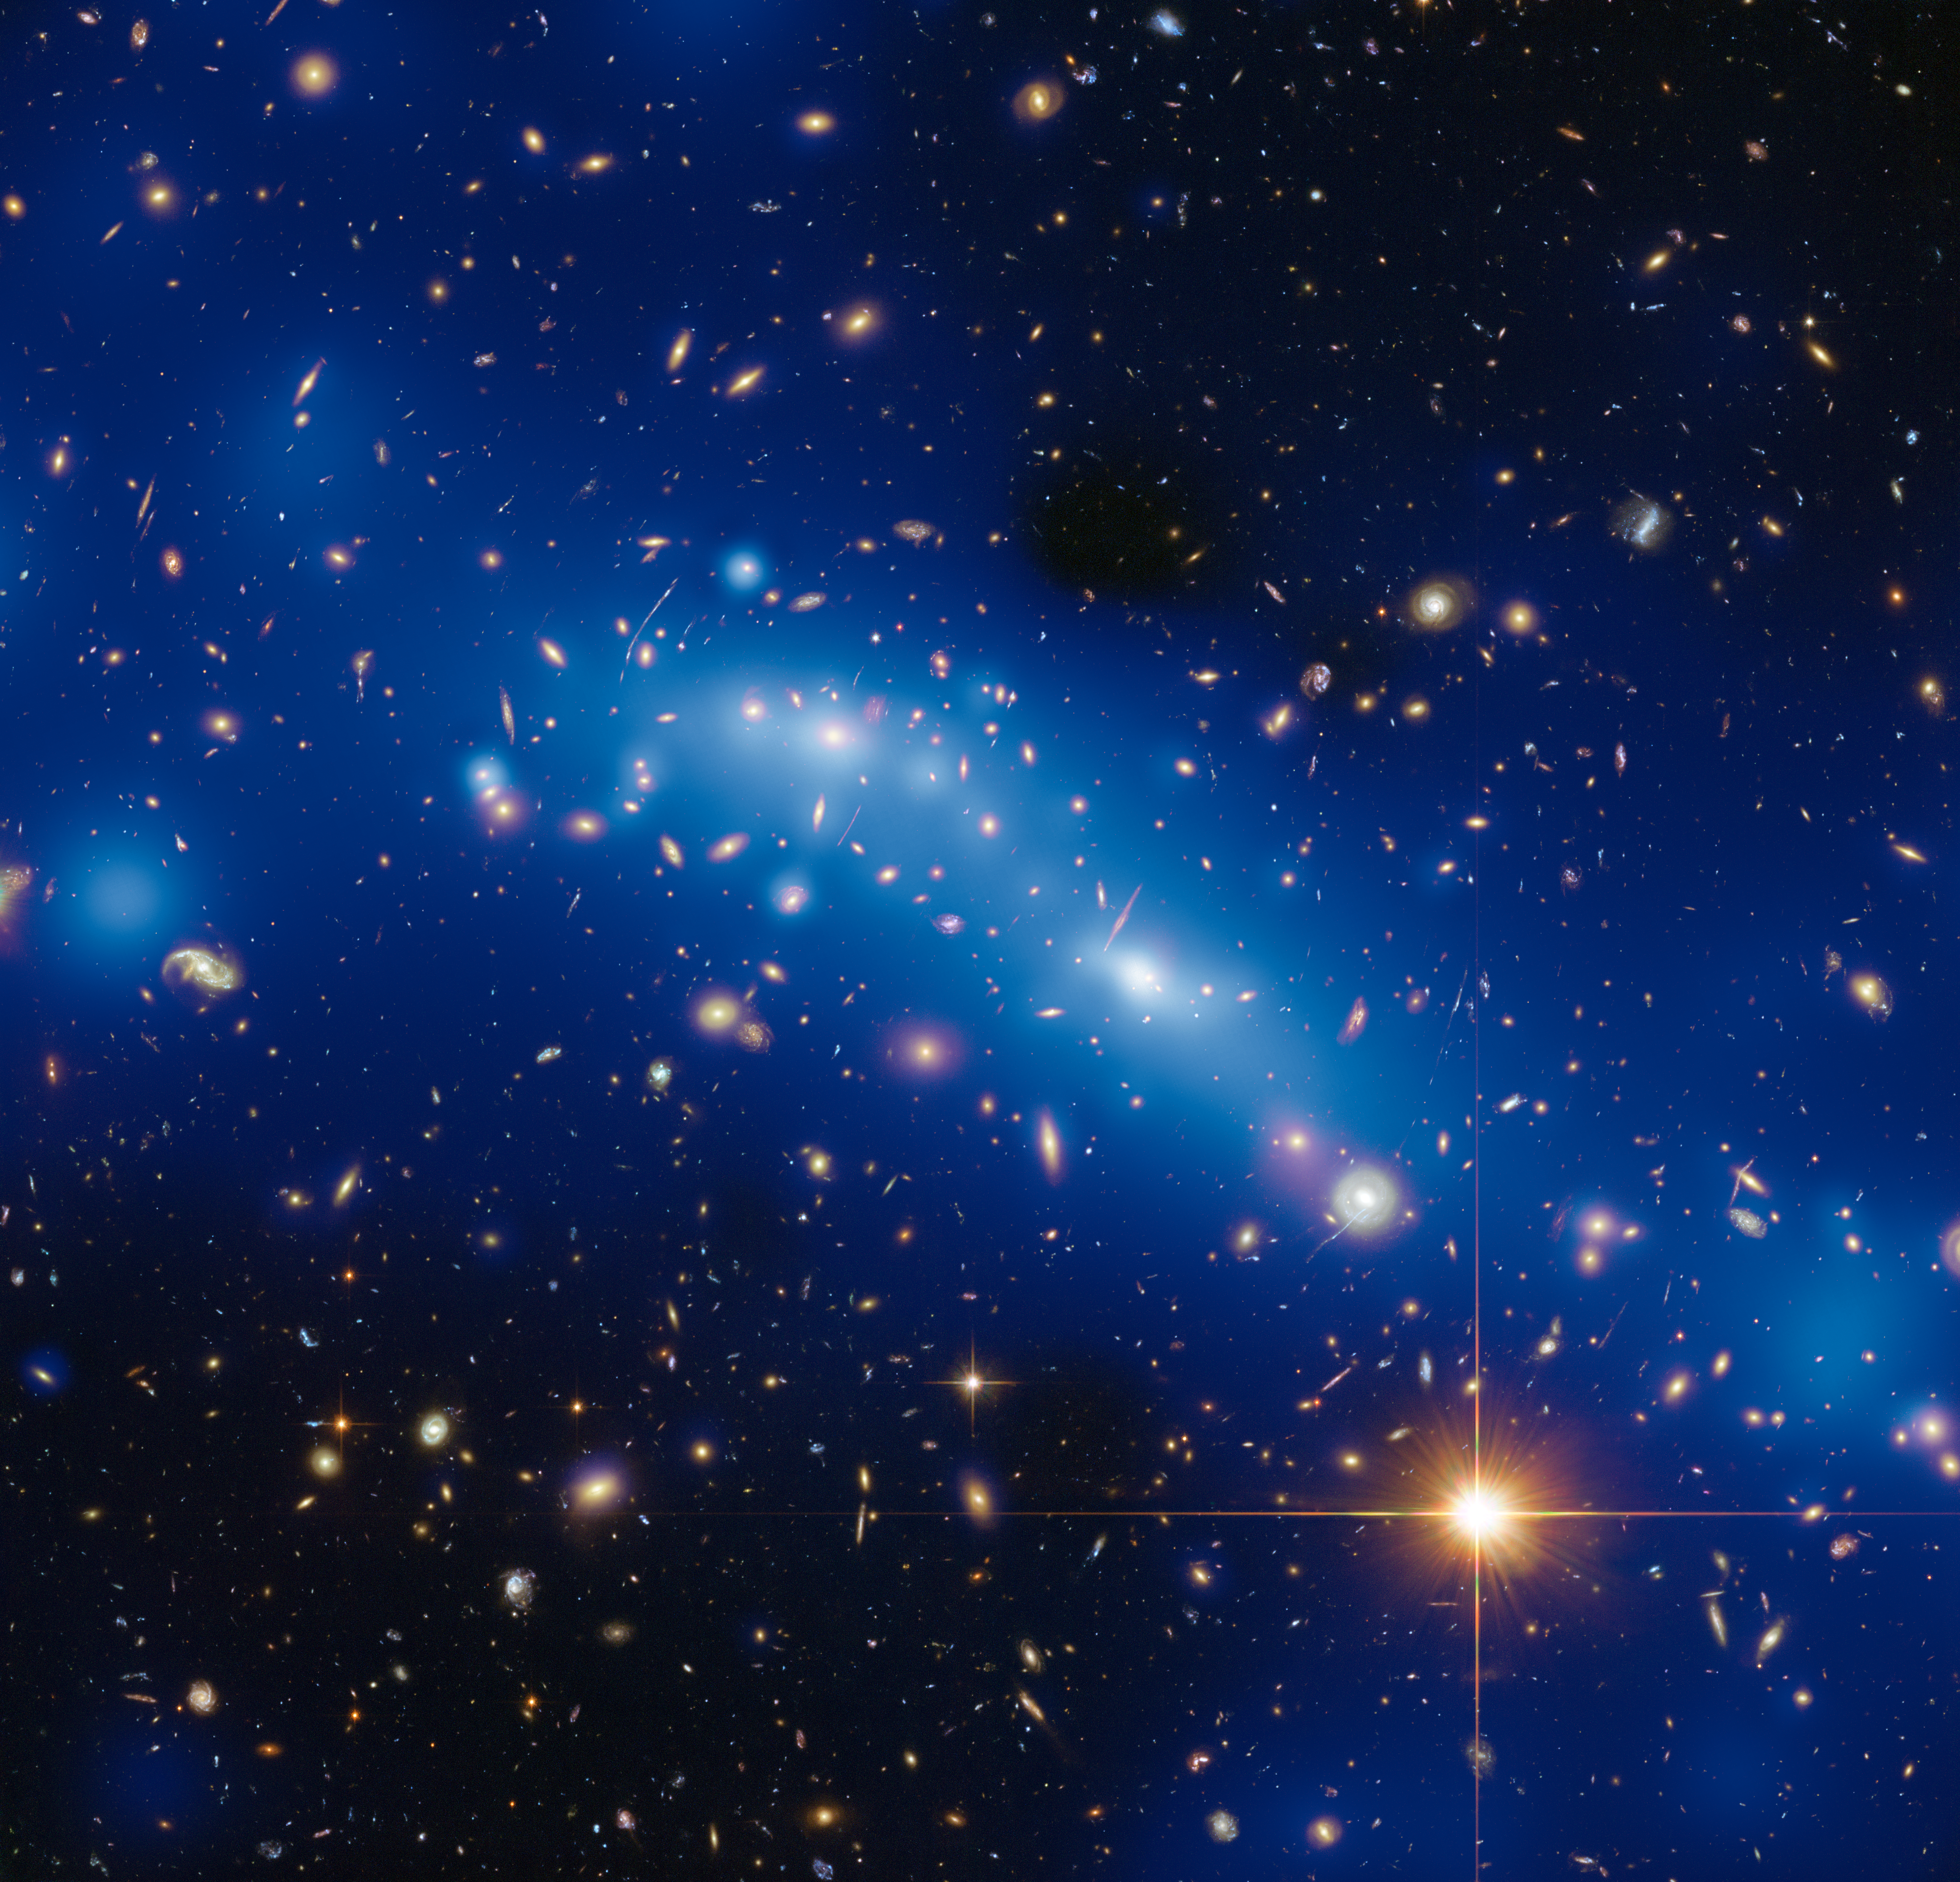

Mass map of galaxy cluster MCS J0416.1–2403 using strong and weak lensing

This image shows the galaxy MCS J0416.1–2403, one of six clusters targeted by the Hubble Frontier Fields programme.

The varying intensity of blue haze in this image is a mass map created by using new Hubble observations combined with the magnifying power of a process known as gravitational lensing.

Strong lensing gives a much more precise indication of the mass at the cluster’s core whilst weak lensing provides valuable information about the mass surrounding the cluster core.

Credit: ESA/Hubble, NASA, HST Frontier Fields Acknowledgement: Mathilde Jauzac (Durham University, UK and Astrophysics & Cosmology Research Unit, South Africa) and Jean-Paul Kneib (École Polytechnique Fédérale de Lausanne, Switzerland)